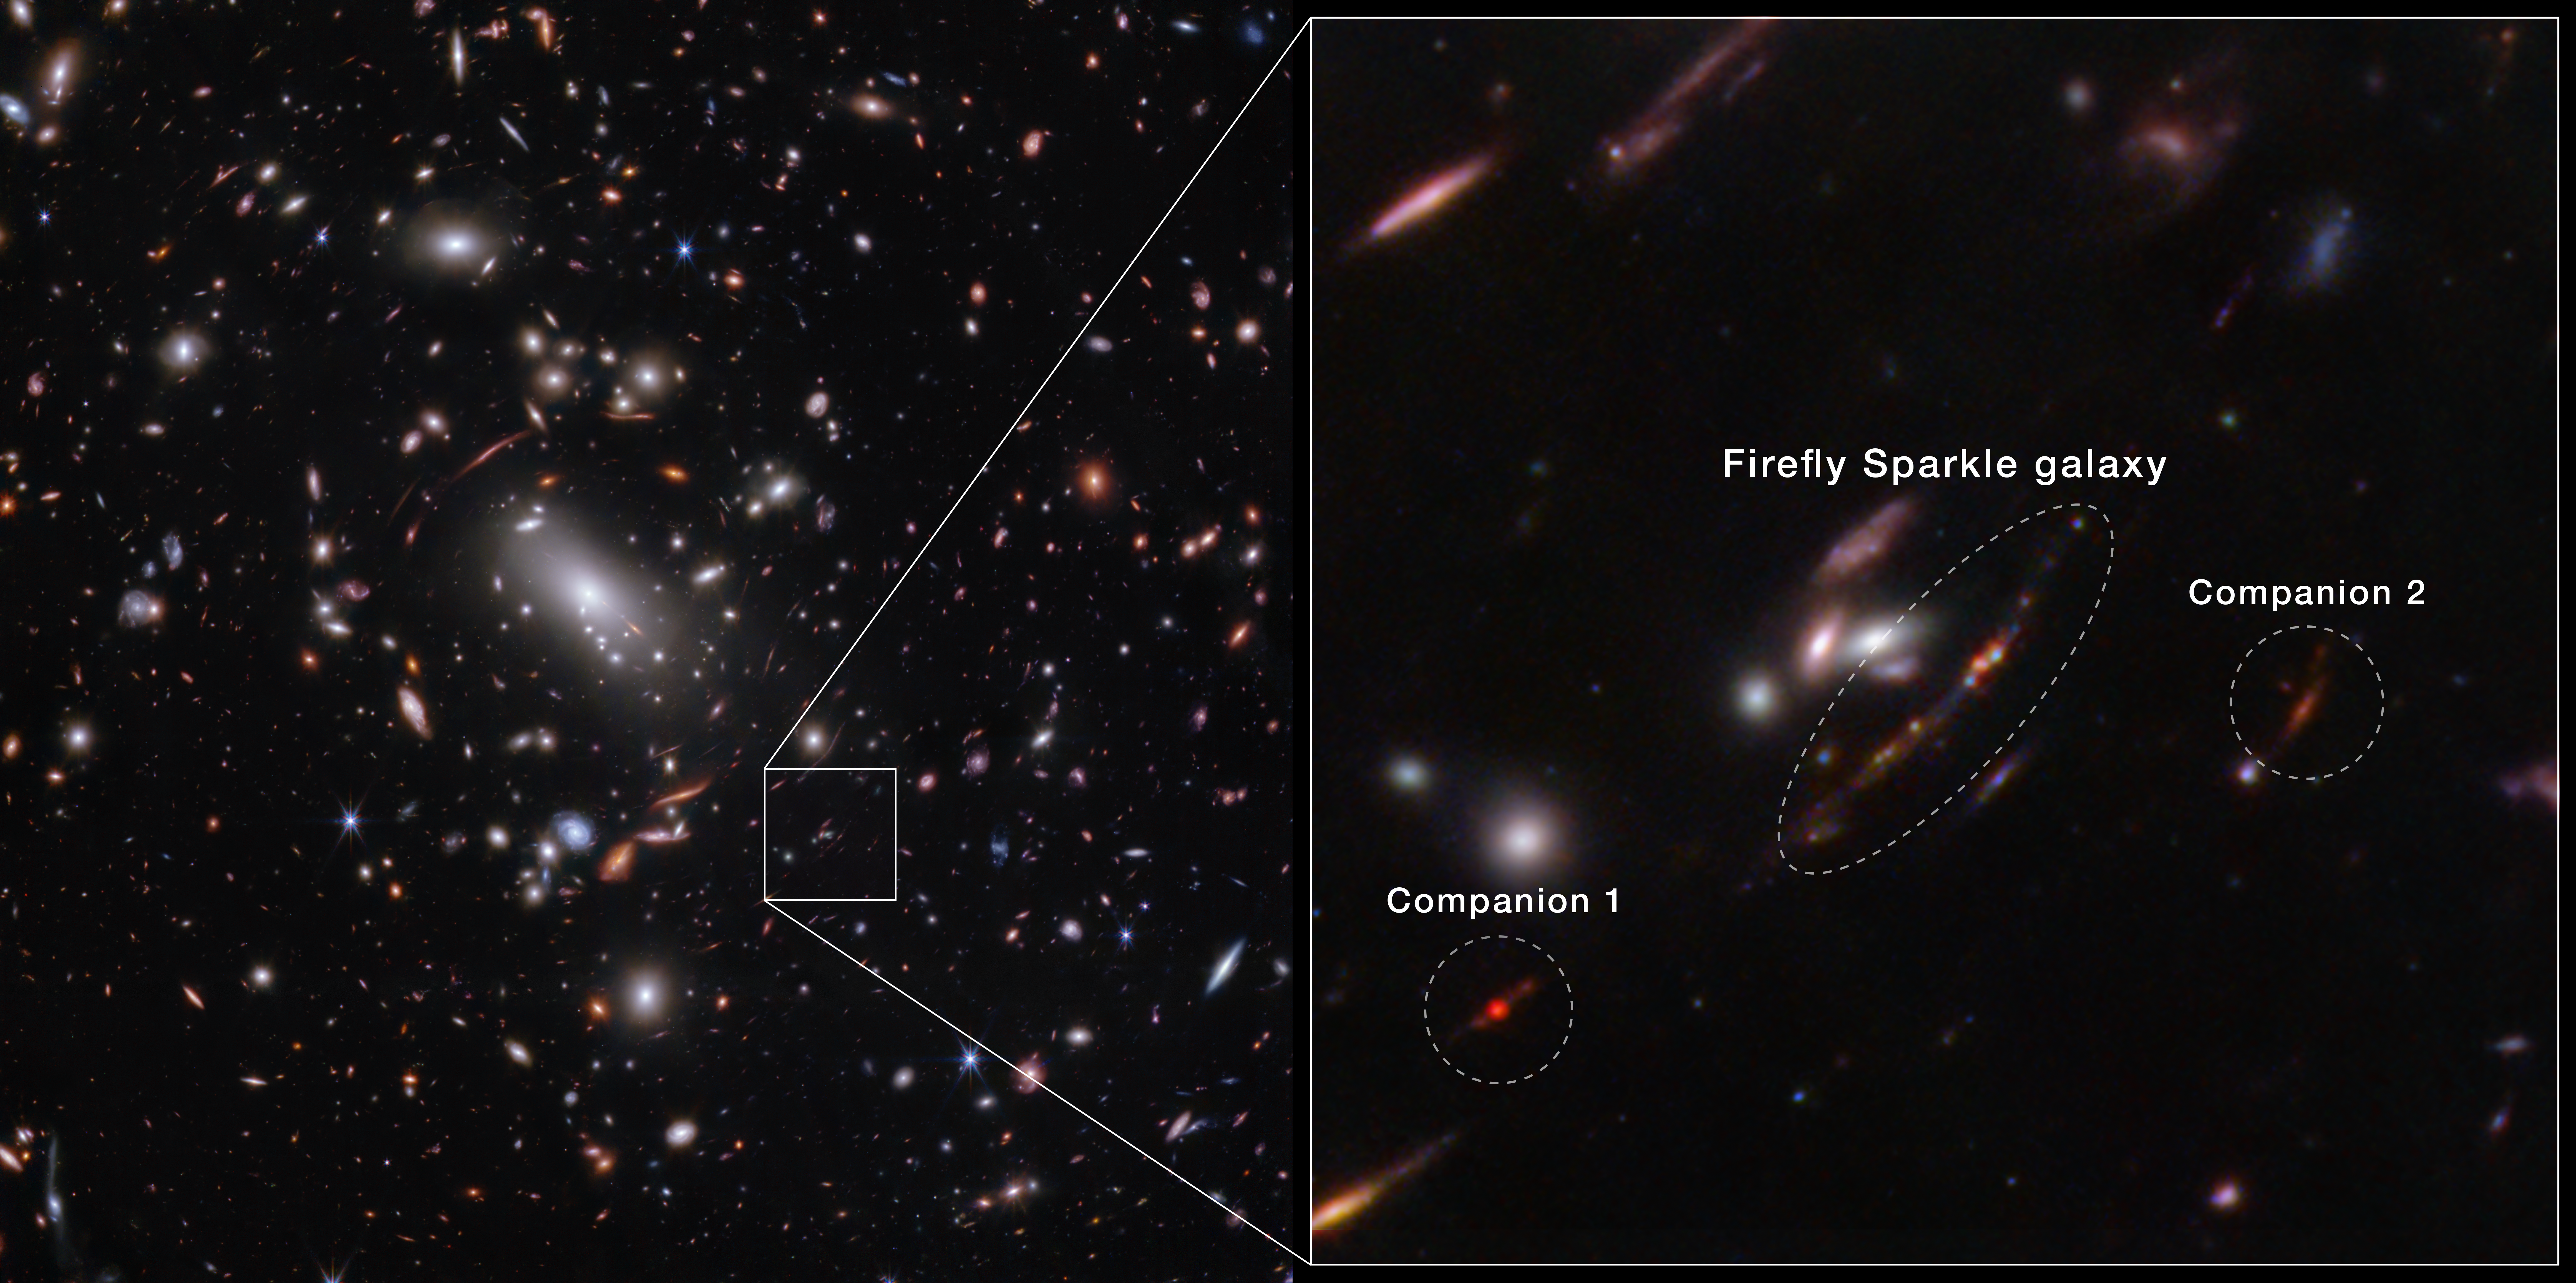

Firefly Sparkle Galaxy Inset (NIRCam Image)

For the first time, astronomers have identified a still-forming galaxy that weighs about the same as our Milky Way if we could wind back the clock to see our galaxy as it developed. The newly identified galaxy, the Firefly Sparkle, is in the process of assembling and forming stars, and existed about 600 million years after the Big Bang.

The image of the galaxy is stretched and warped by a natural effect known as gravitational lensing, which allowed researchers to glean far more information about its contents. (In some areas of Webb’s image, the galaxy is magnified over 40 times.)

While it took shape, the galaxy gleamed with star clusters in a range of infrared colours, which are scientifically meaningful. They indicate that the stars formed at different periods, not all at once.

Since the galaxy image is stretched into a long line in Webb’s observations, researchers were able to identify 10 distinct star clusters and study them individually, along with the cocoon of diffuse light from the additional, unresolved stars surrounding them. That’s not always possible for distant galaxies that aren’t lensed. Instead, in many cases researchers can only draw conclusions that apply to an entire galaxy. “Most of the other galaxies Webb has shown us aren’t magnified or stretched and we are not able to see the ‘building blocks’ separately. With Firefly Sparkle, we are witnessing a galaxy being assembled brick by brick,” explains astronomer Lamiya Mowla.

There are two companion galaxies ‘hovering’ close by, which may ultimately affect how this galaxy forms and builds mass over billions of years. Firefly Sparkle is only about 6500 light-years away from its first companion, and 42 000 light-years from its second companion. Let’s compare these figures to objects that are closer to home: the Sun is about 26 000 light-years from the centre of our Milky Way galaxy, and the Milky Way is about 100 000 light-years across. Not only are Firefly Sparkle’s companions very close, the researchers also suspect that they are orbiting one another.

Credit: NASA, ESA, CSA, STScI, C. Willott (NRC-Canada), L. Mowla (Wellesley College), K. Iyer (Columbia)